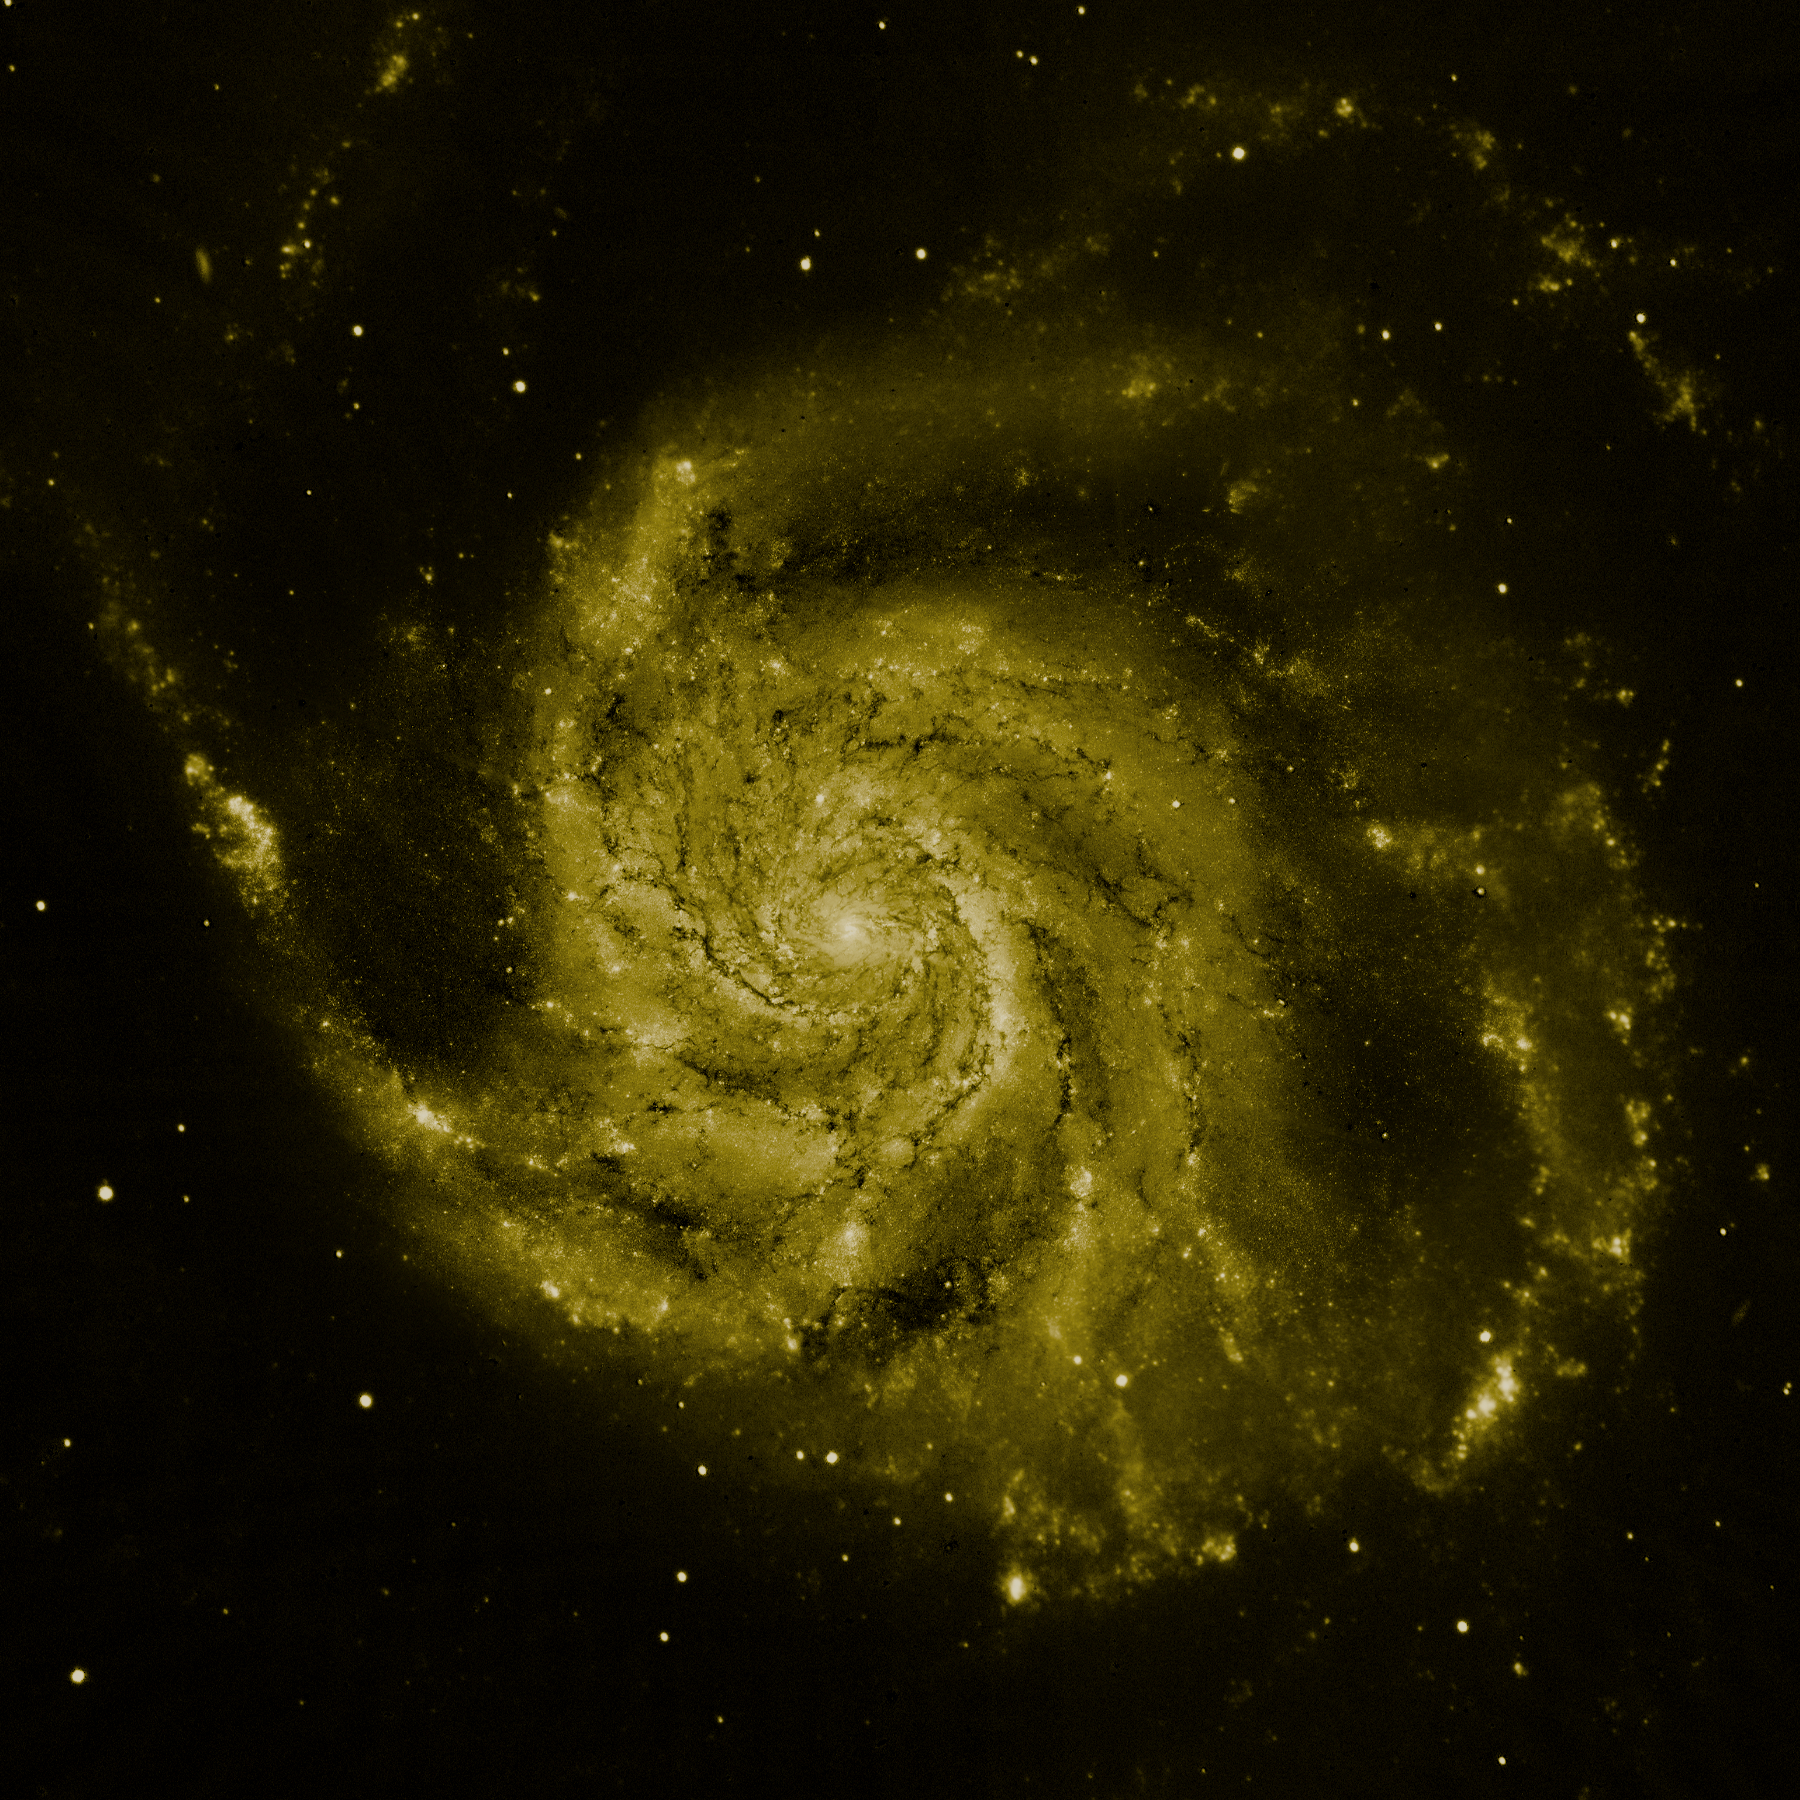

M101 composite image: Hubble data (green component)

The yellow colour is Hubble's view in visible light. Most of this light comes from stars, and they trace the same spiral structure as the dust lanes.

Credit: NASA, ESA, K. Kuntz (JHU), F. Bresolin (University of Hawaii), J. Trauger (Jet Propulsion Lab.), J. Mould (NOAO), Y.-H. Chu (University of Illinois, Urbana) and STScI